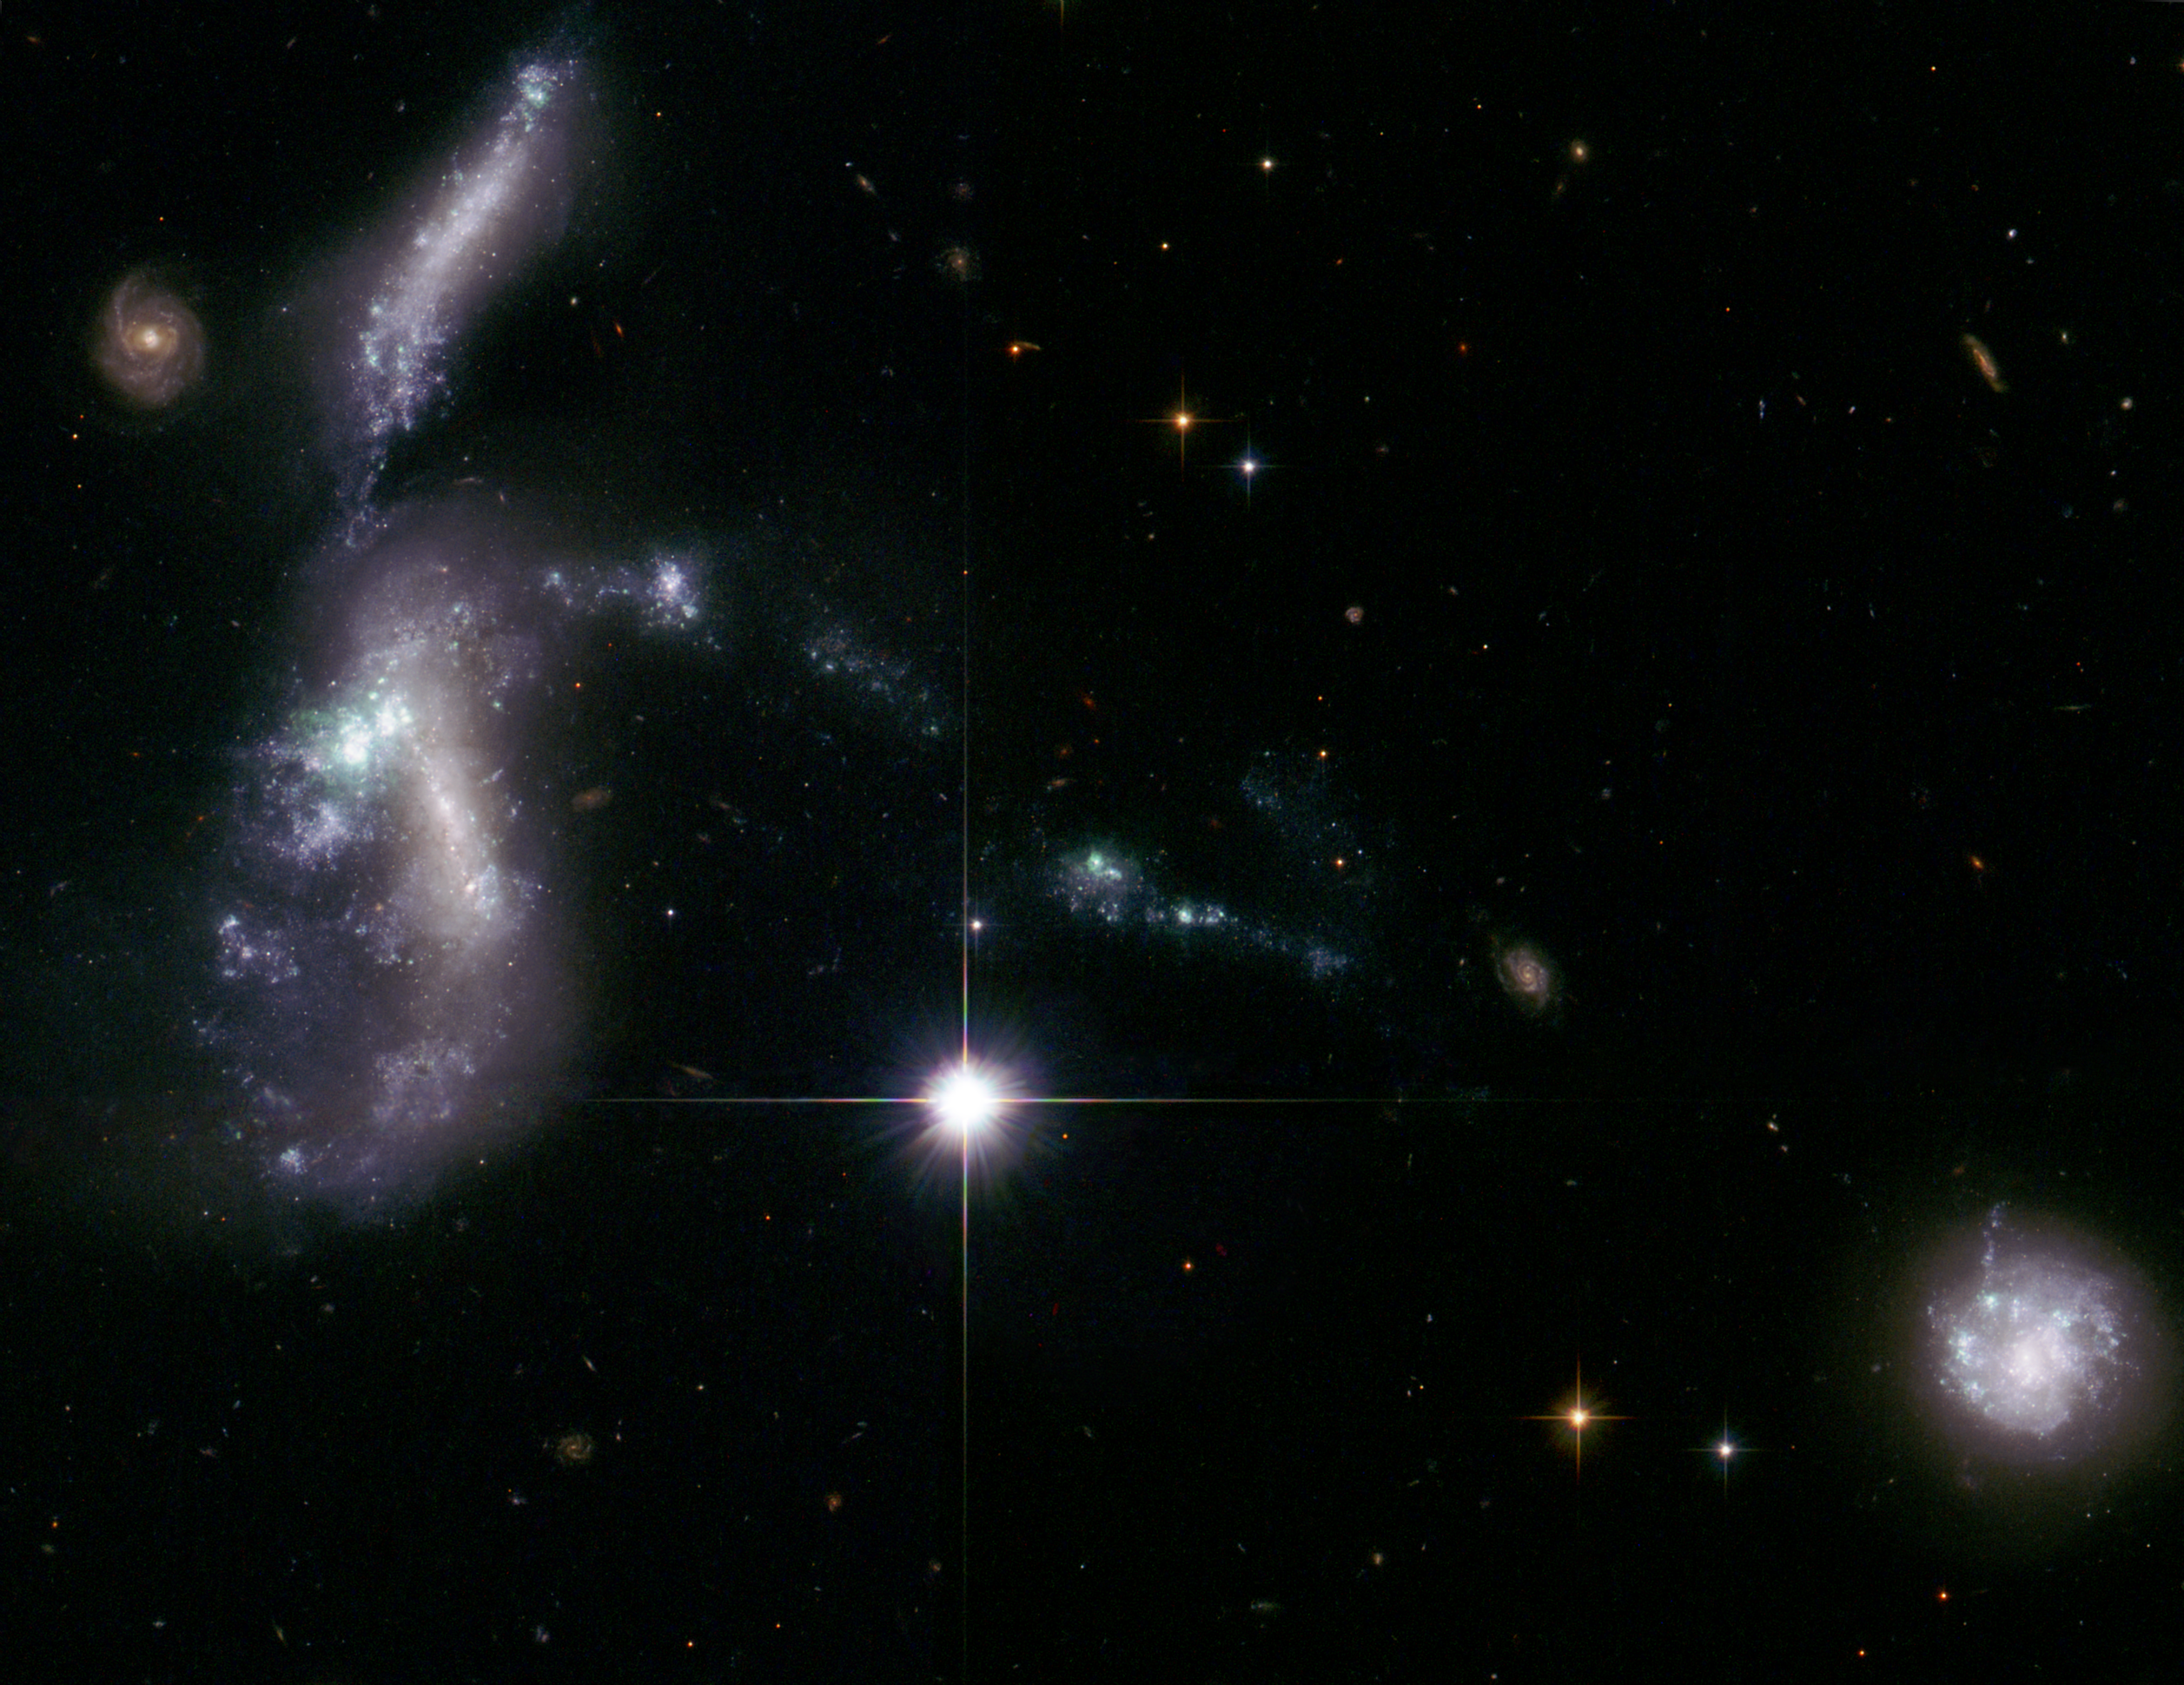

Hubble's view of Hickson Compact Group 31

These four dwarf galaxies waited billions of years to come together, setting off a fireworks show as thousands of new star clusters come to life. The distorted galaxies are quickly producing massive, hot, young stars that are pumping out ultraviolet radiation, heating up surrounding gas clouds, and causing them to glow.

Such encounters between dwarf galaxies are normally seen billions of light-years away and therefore occurred billions of years ago. But these galaxies, members of Hickson Compact Group 31, are relatively nearby, only 166 million light-years away.

In this image, taken by the NASA/ESA Hubble Space Telescope, the bright, distorted object at middle, left, is actually two colliding dwarf galaxies. Myriad star clusters have formed in the streamers of debris pulled from the galaxies and at the site of their head-on collision. The cigar-shaped object above the galaxy duo is another member of the group. A bridge of star clusters connects the trio. A long rope of bright star clusters points to the fourth member of the group, at lower right. The bright object in the center is a foreground star.

Astronomers used Hubble's Advanced Camera for Surveys to resolve the youngest and brightest of star clusters, which allowed them to calculate the clusters' ages, map the star-formation history, and determine that the galaxies are starting the final stages of galaxy assembly. Hubble reveals that the brightest clusters, hefty groups each holding at least 100,000 stars, are less than 10 million years old.

Astronomers say the interacting galaxies will form a large elliptical galaxy in another billion years.

The Advanced Camera for Surveys data were taken on 8 August 2006. The principal investigator was Jane Charlton of Pennsylvania State University, University Park (USA).

Credit: NASA, ESA, J. English (University of Manitoba) and the Hubble Heritage Team (STScI/AURA). Acknowledgment: S. Gallagher (The University of Western Ontario)